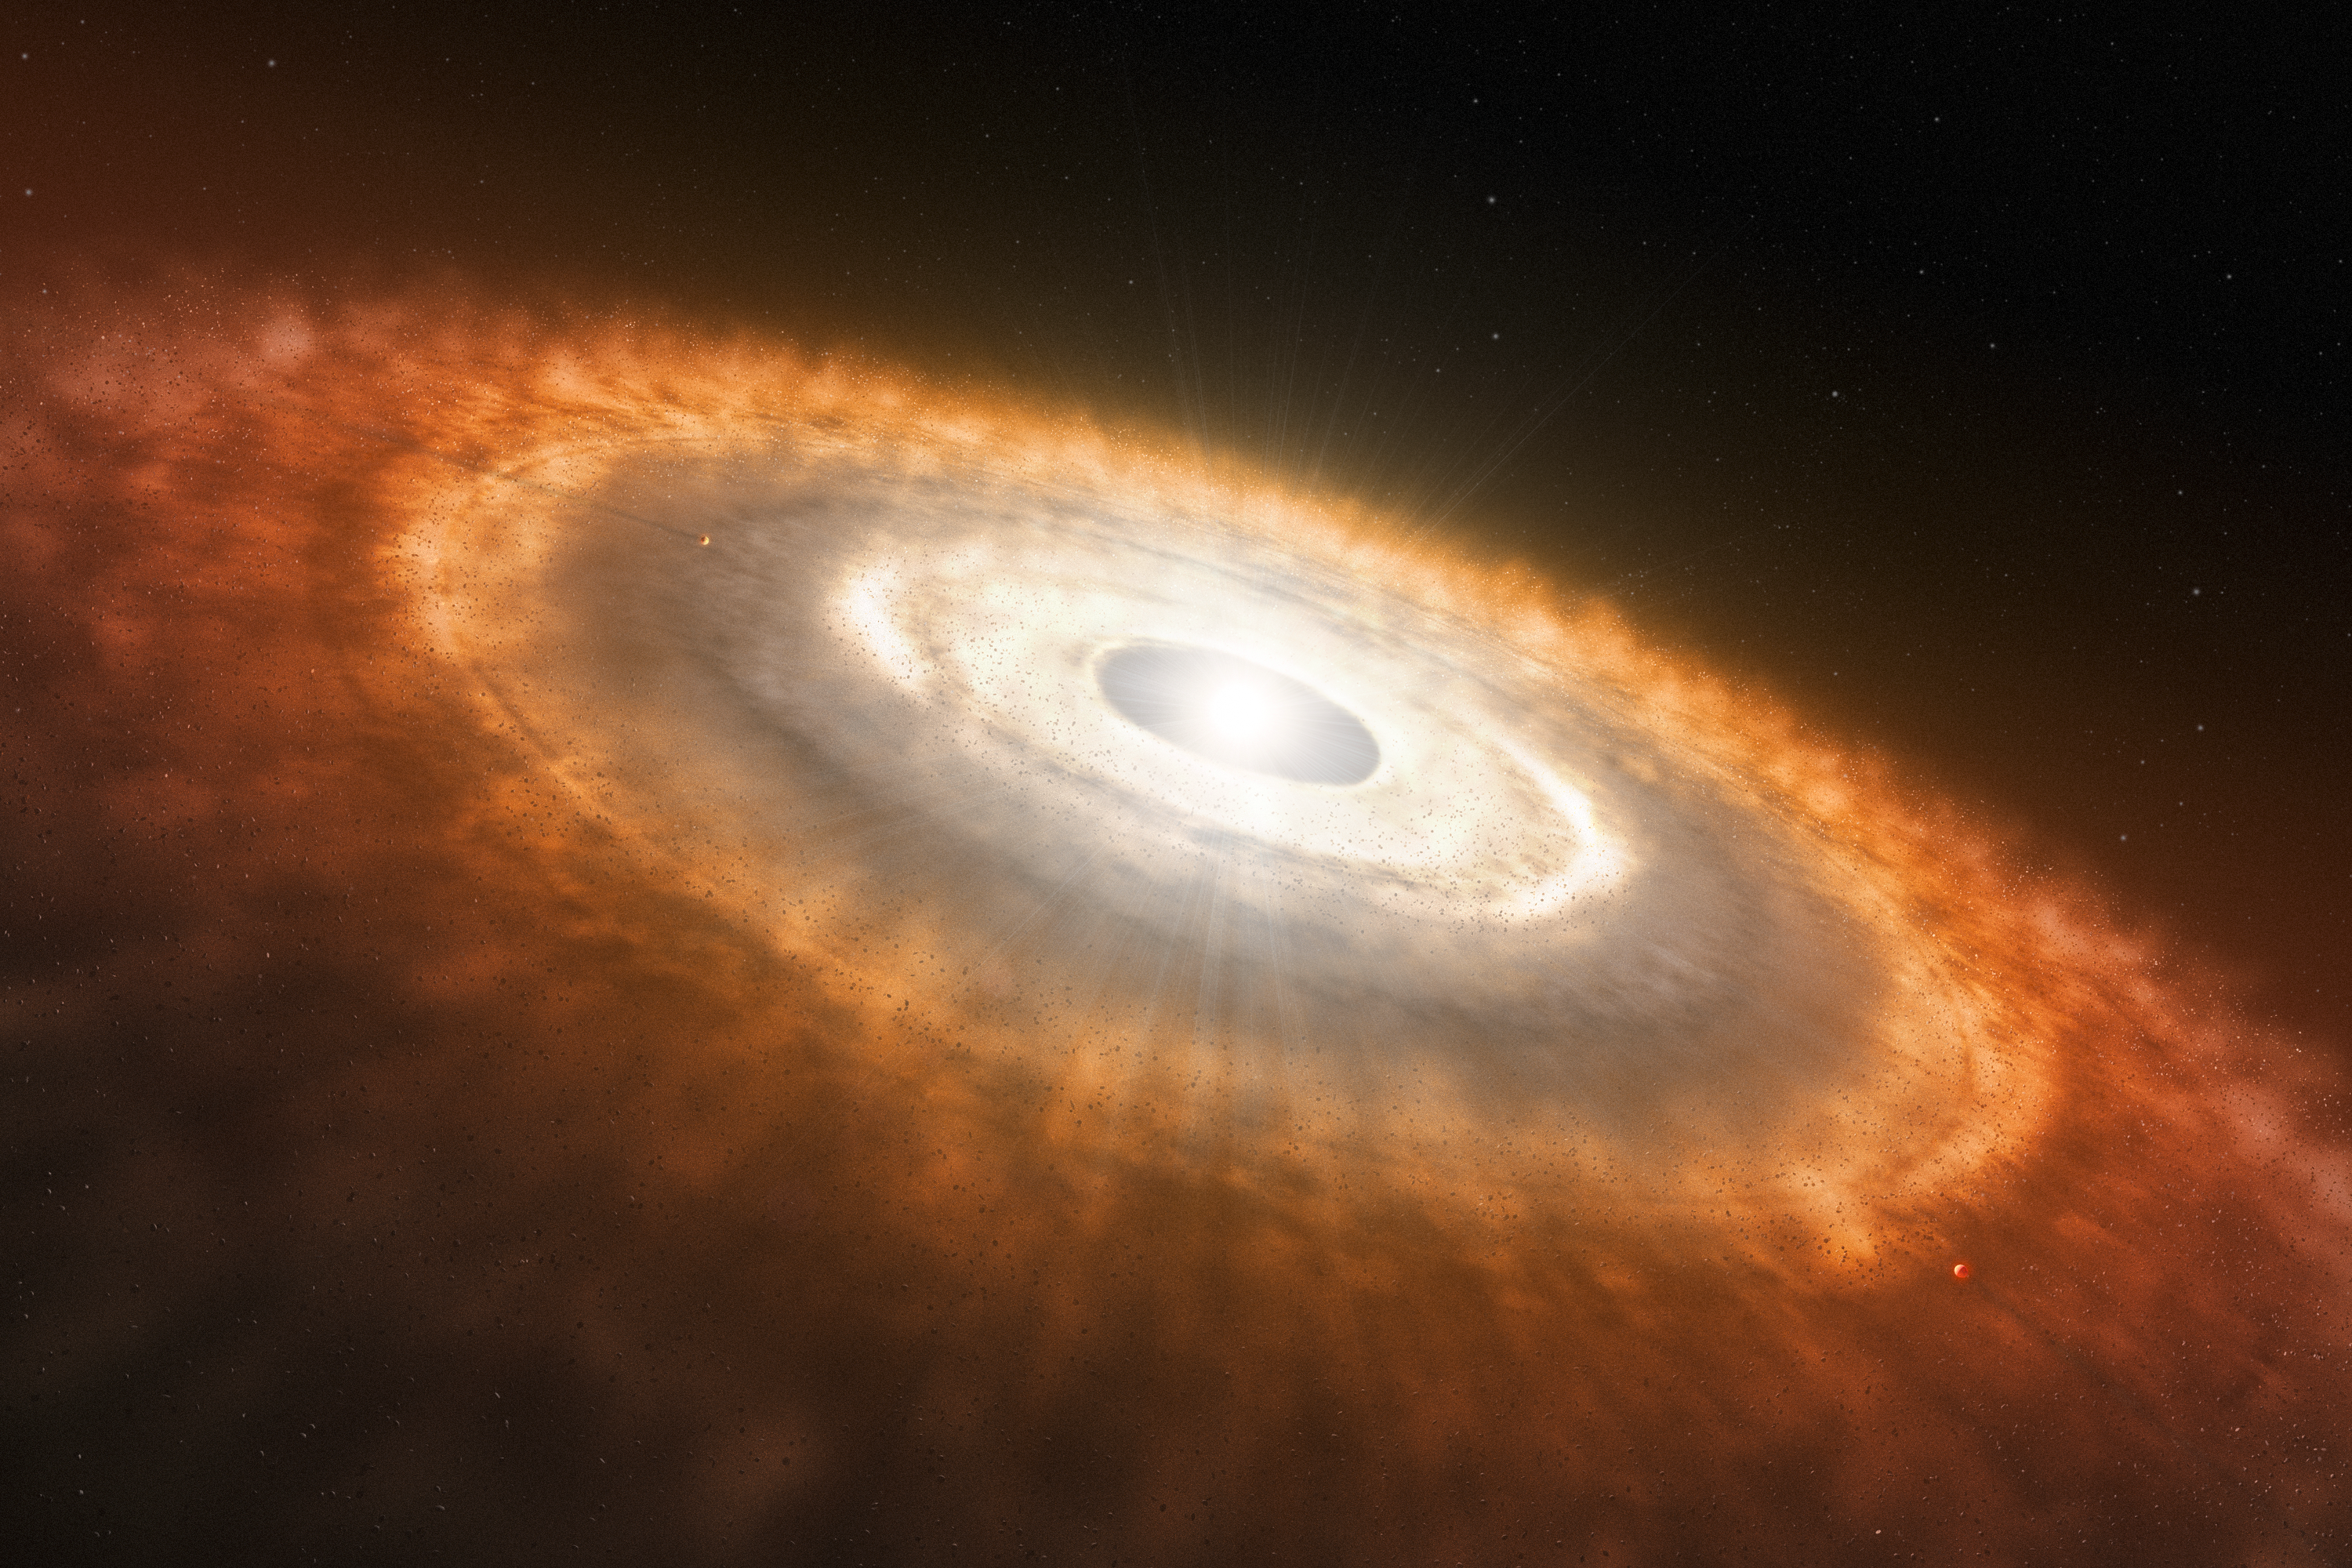

Artist’s impression of protoplanetary disc

This is an artist’s impression of a young star surrounded by a protoplanetary disc in which planets are forming.

An international team of astronomers have used the NASA/ESA/CSA James Webb Space Telescope to provide the first observation of water and other molecules in the inner, rocky-planet-forming regions of a disc in one of the most extreme environments in our galaxy. These results suggest that the conditions for rocky-planet formation, typically found in the discs of low-mass star-forming regions, can also occur in massive-star-forming regions and possibly a broader range of environments.

Credit: ESO/L. Calçada